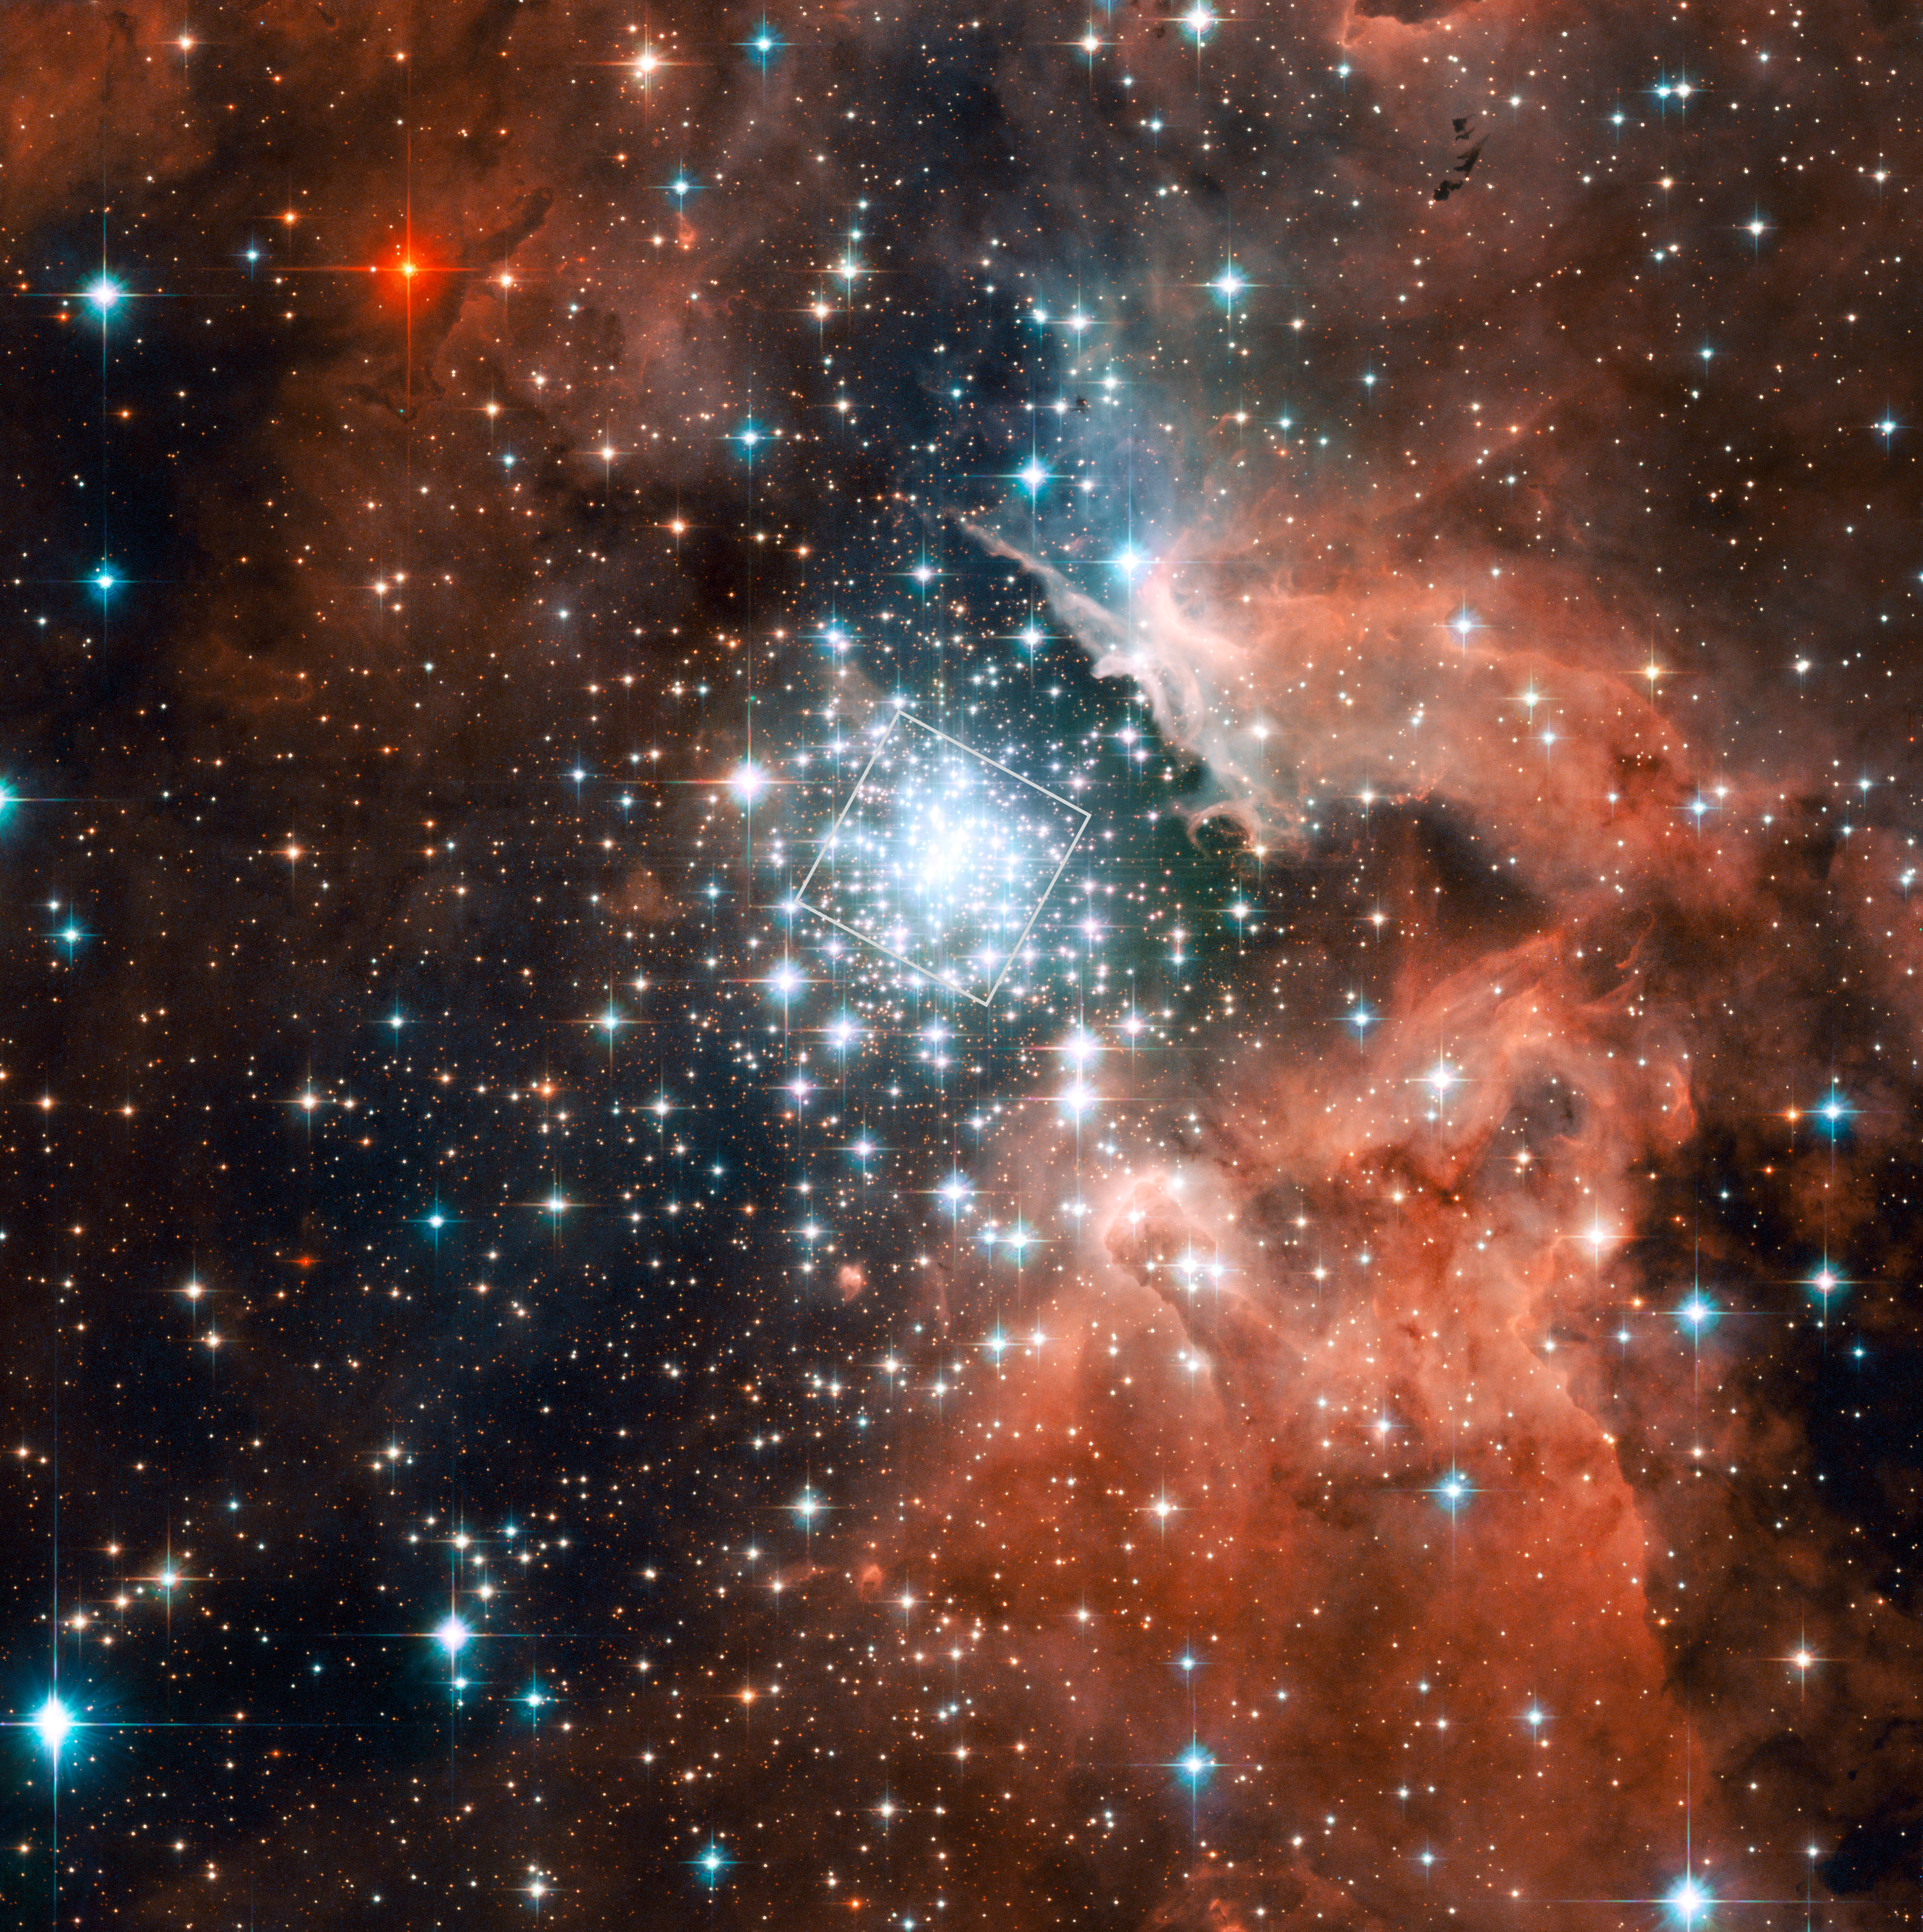

The massive compact star cluster in NGC 3603 and its surroundings

This view of the rich star formation region NGC 3603 and its massive compact central star cluster was taken with the Advanced Camera for Surveys (ACS) on the NASA/ESA Hubble Space Telescope. The region that was studied in detail to detect the motion of stars within the cluster is shown as a box.

Credit: NASA, ESA and the Hubble Heritage (STScI/AURA)-ESA/Hubble Collaboration